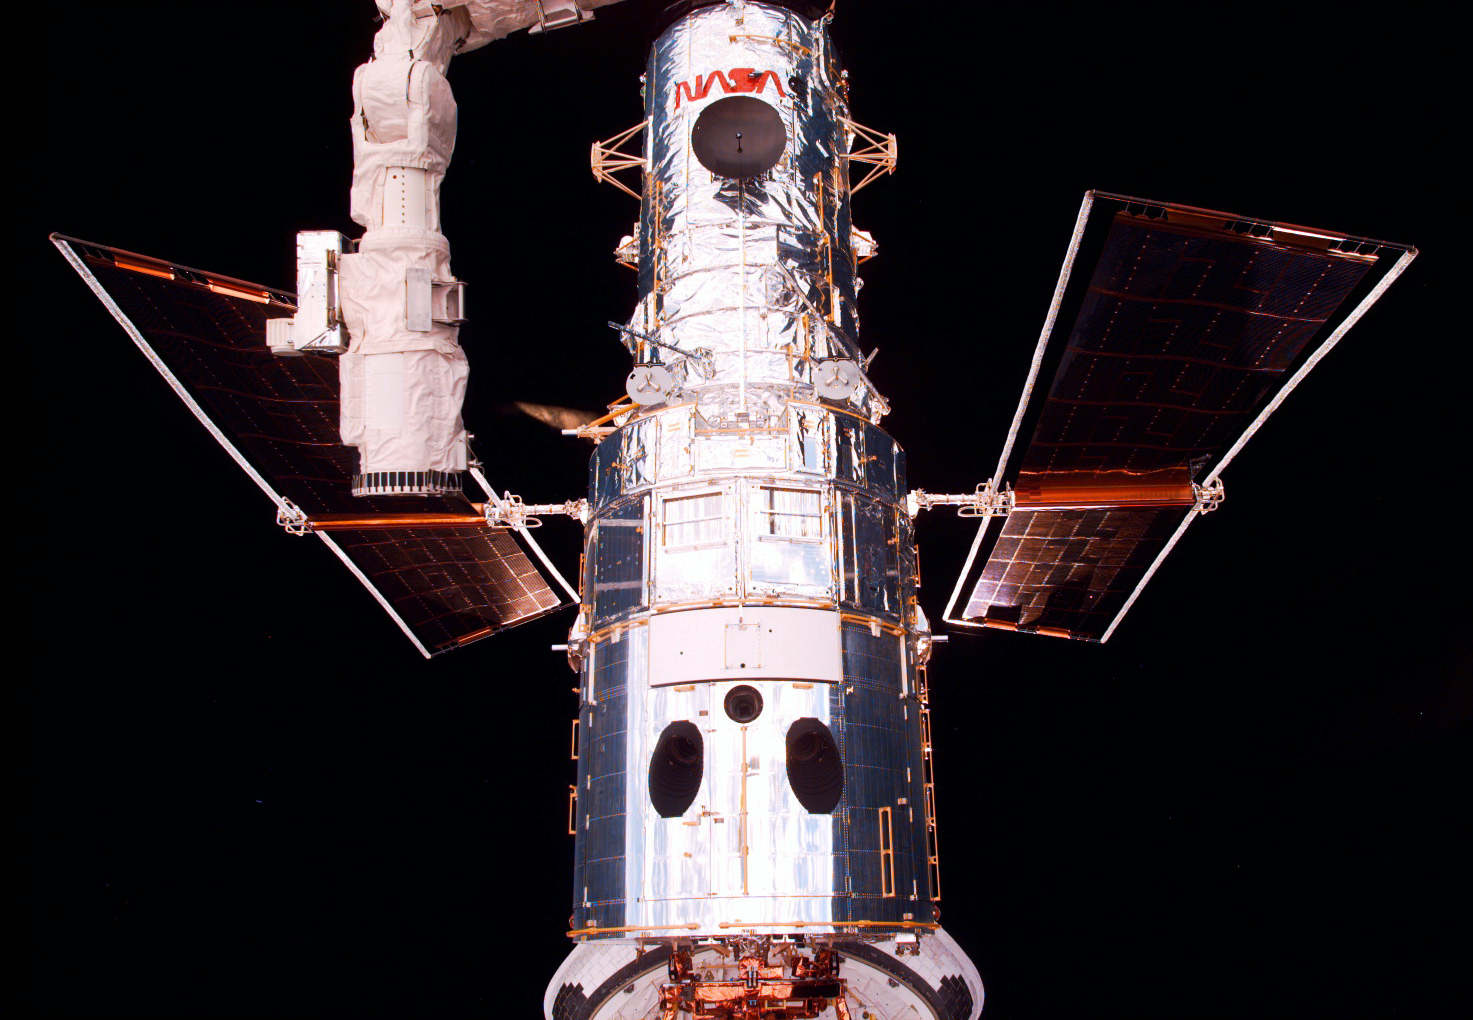

SM2: Hubble Close-Up

The Hubble Space Telescope (HTS) begins its separation from Discovery following its release.

Credit: NASA/ESA